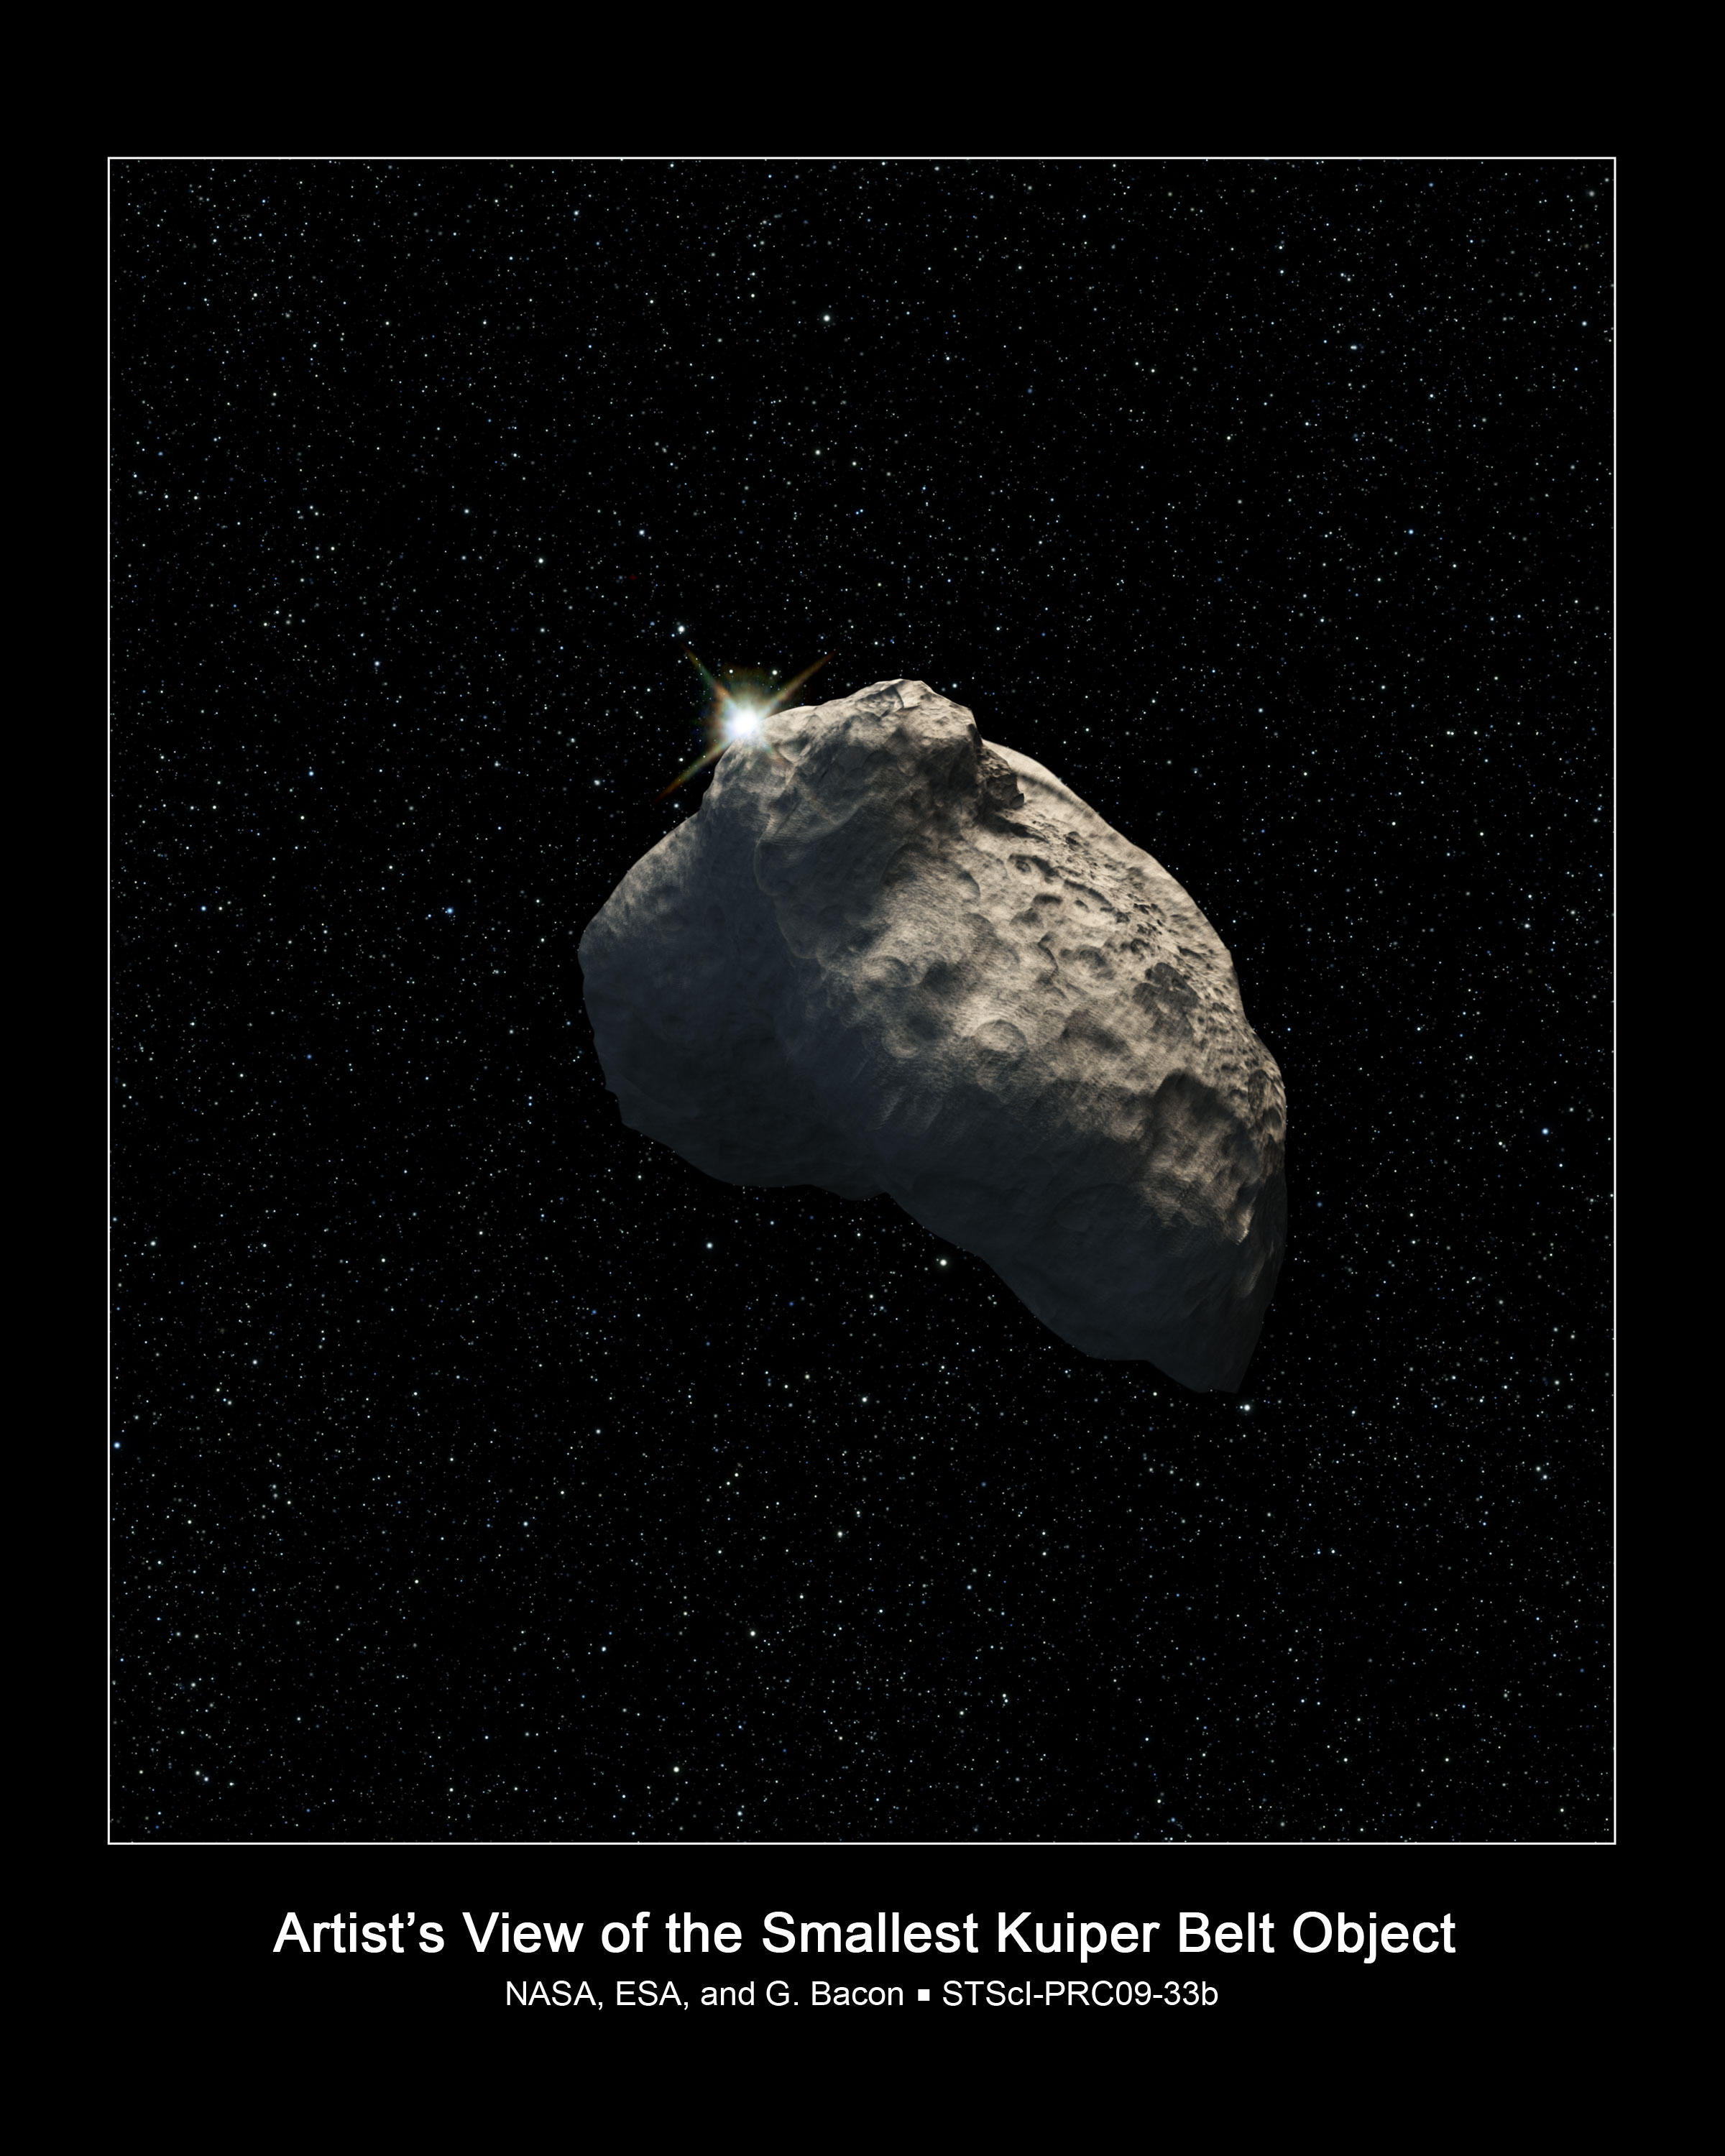

Smallest Kuiper Belt Object detected (artist's impression)

This is an artist's impression of a Kuiper Belt Object (KBO) 800 metres in diameter, that was detected by the NASA/ESA Hubble Space Telescope. The icy relic from the early Solar System is too small for Hubble to photograph. The object was detected when it passed in front of a background star, temporarily disrupting the starlight.

Credit: NASA, ESA, and G. Bacon (STScI)